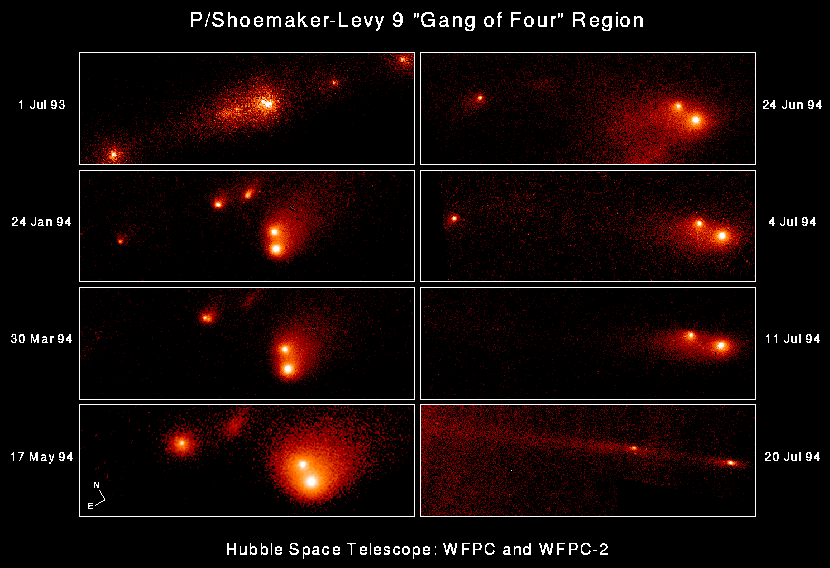

Shoemaker-Levy 9

This series of eight NASA Hubble Space Telescope "snapshots" shows the evolution of the P-Q complex, also called the "gang of four' region, of Comet P/Shoemaker-Levy 9.

The eight individual frames chronicle changes in the comet during the 12 months before colliding with Jupiter. The sequence shows that the relative separations of the various cometary fragments, thought to range in size from about 500 meters to almost 4 km (2.5 miles) across, changed dramatically over this period. The apparent separation of Q1 and Q2 was only about 1100 kilometers (680 miles) on 1 July 1993 and increased to 28,000 kilometers (17,400 miles) by 20 July 1994.

Credit: Dr. H. A. Weaver, Mr. T. E. Smith, and Mr. K. B. Jones (STScI), and NASA